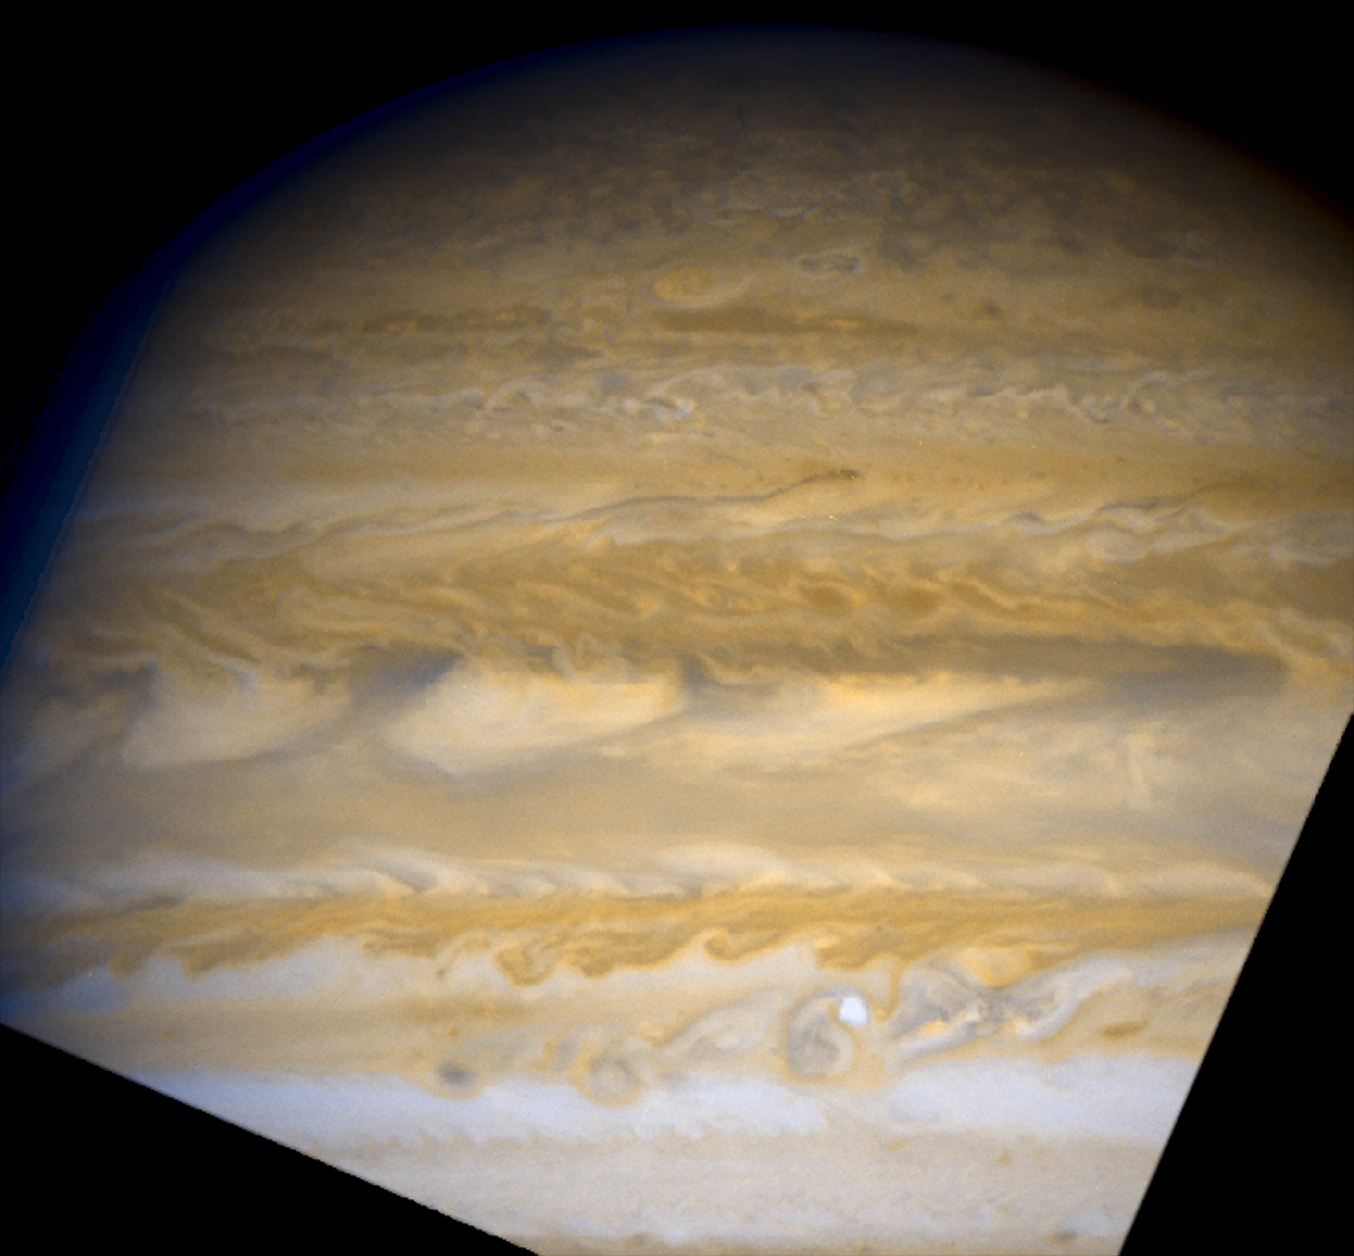

Jupiter - June 5, 2007 (Full Field)

Full field image of Jupiter taken with WFPC2 on June 5, 2007.

Credit: NASA, ESA, and A. Sanchez-Lavega (University of the Basque Country)